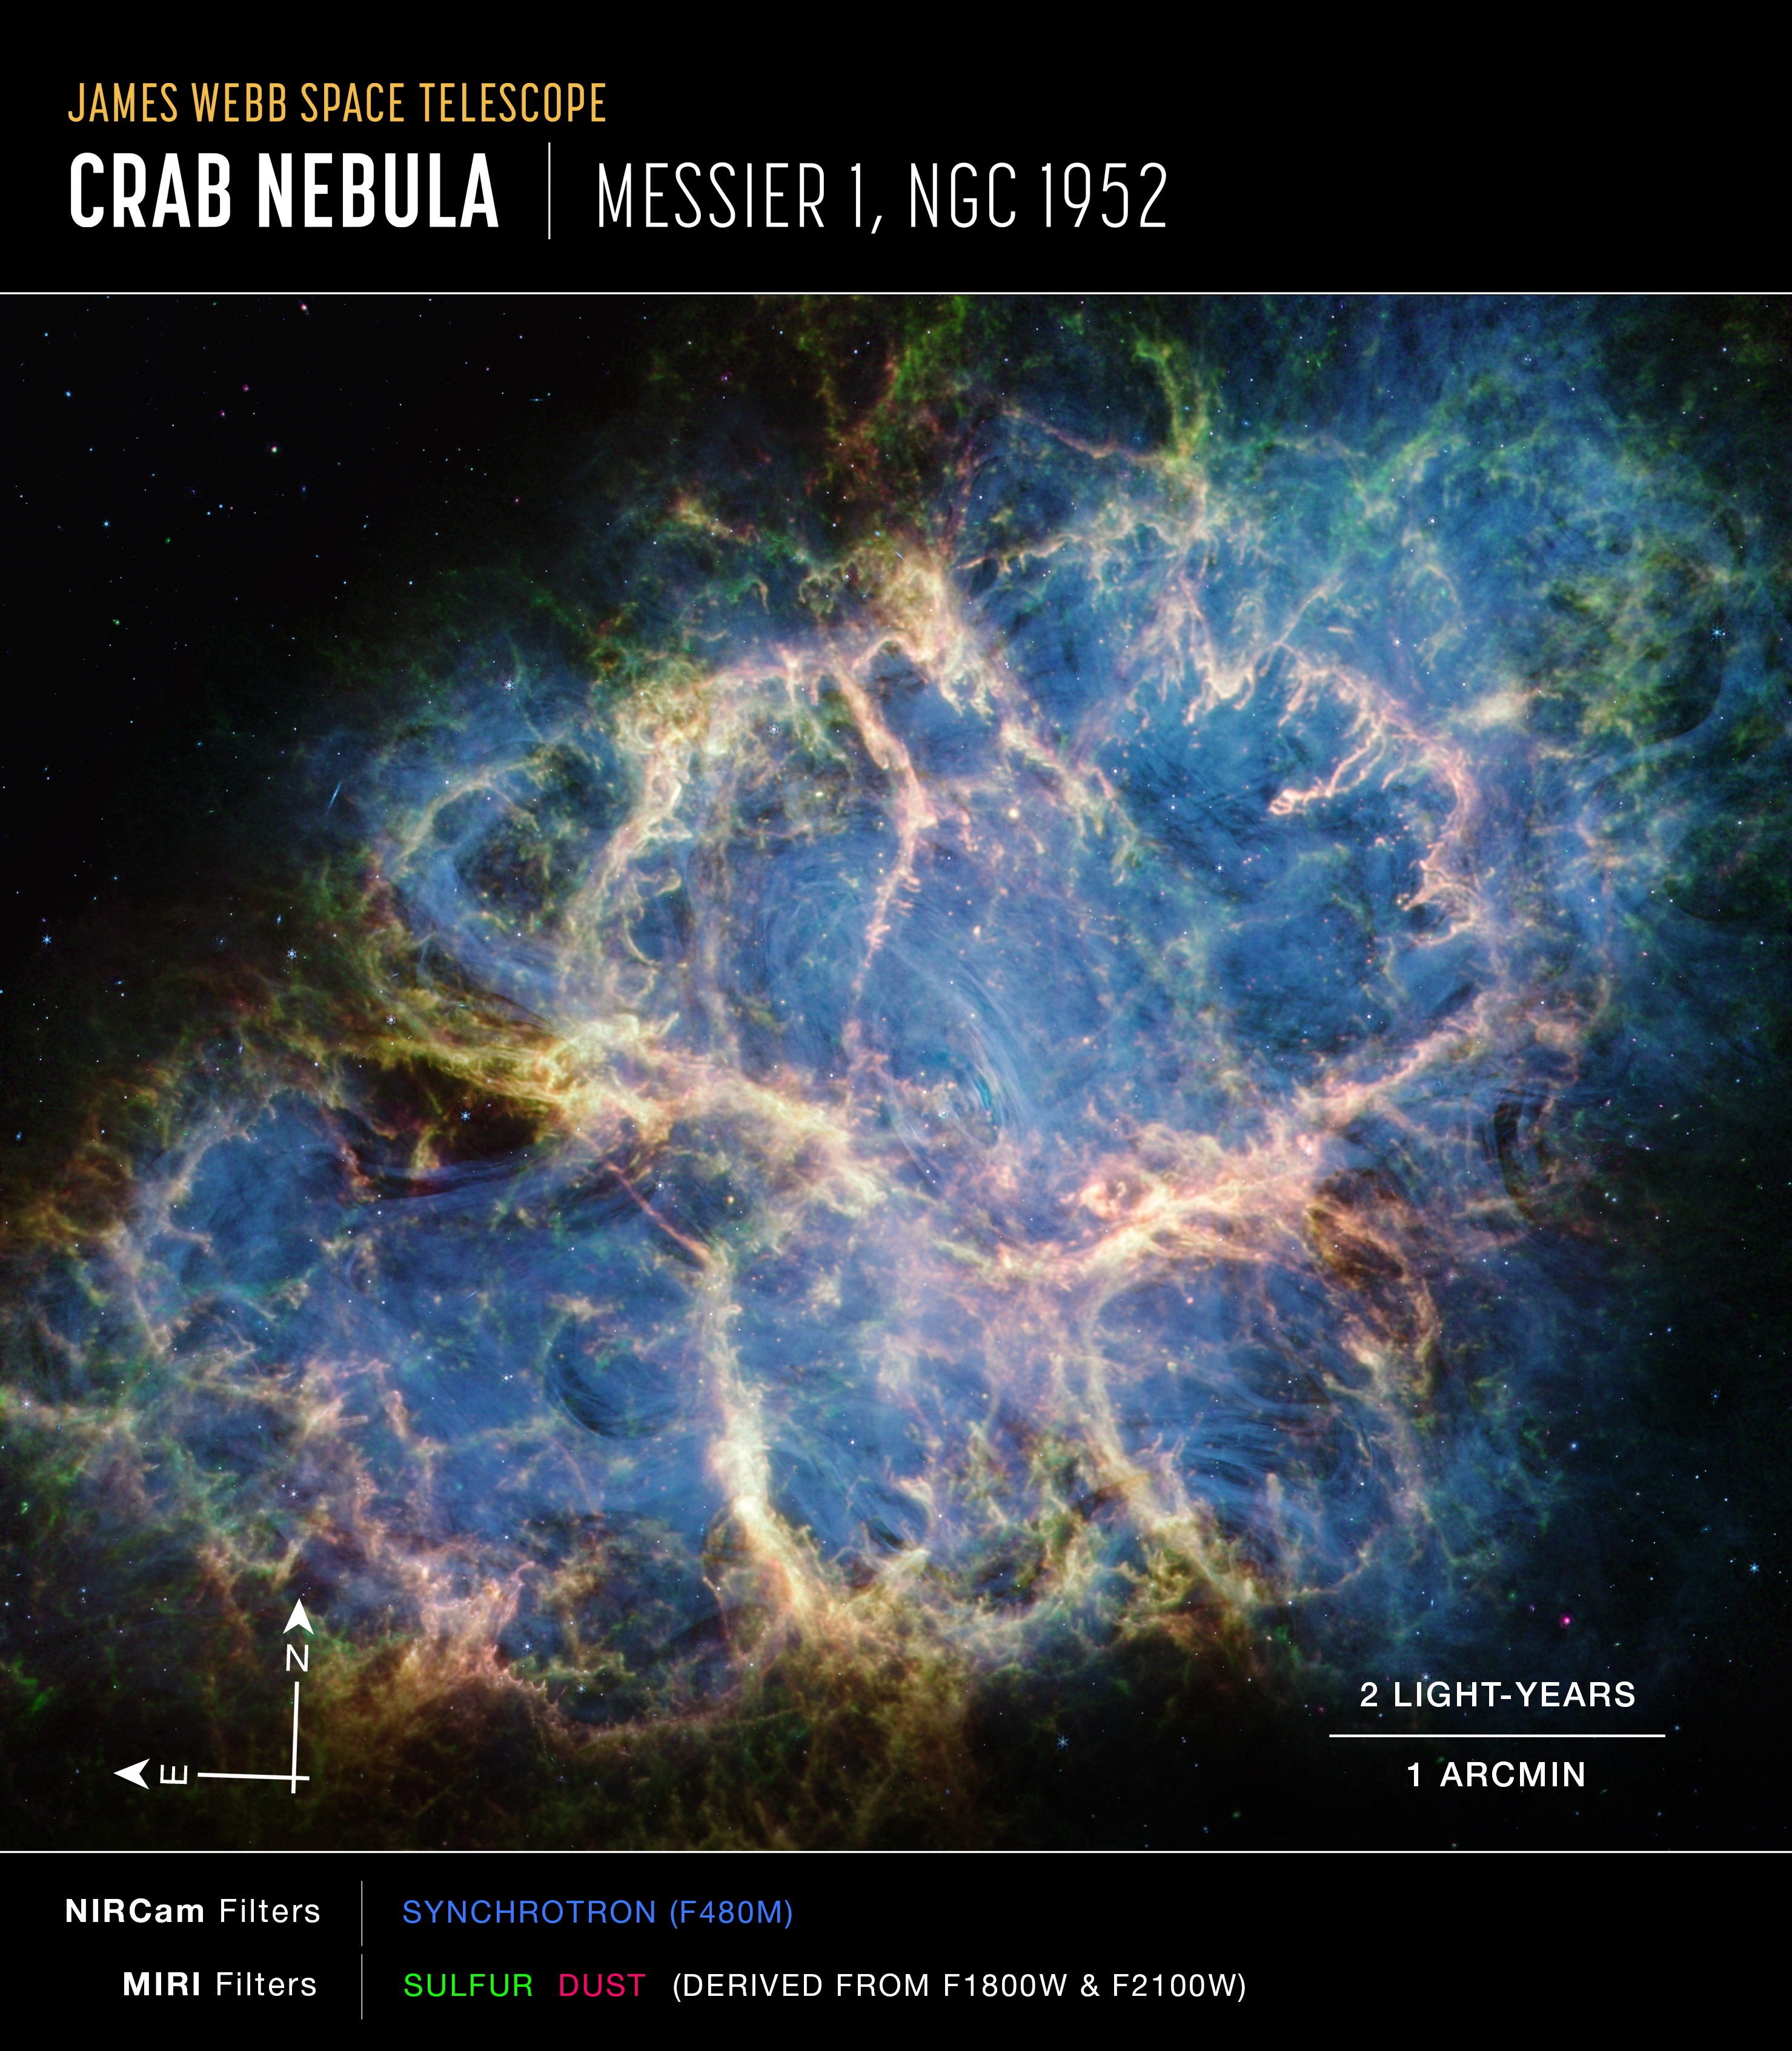

Crab Nebula (MIRI and NIRCam image, annotated)

Image of the Crab Nebula captured by Webb’s NIRCam and MIRI, with compass arrows, scale bar, and colour key for reference.

The north and east compass arrows show the orientation of the image on the sky. Note that the relationship between north and east on the sky (as seen from below) is flipped relative to direction arrows on a map of the ground (as seen from above).

The scale bar is labelled in light-years, which is the distance that light travels in one Earth-year. (It takes two years for light to travel a distance equal to the length of the bar.) One light-year is equal to about 9.46 trillion kilometres or 5.88 trillion miles. The field of view shown in this image is approximately 10 light-years across.

This image shows invisible near-infrared and mid-infrared wavelengths of light that have been translated into visible-light colours. The colour key shows which components were observed by NIRCam and MIRI, and which visible-light colour is assigned to each feature.

Credit: NASA, ESA, CSA, STScI, T. Temim (Princeton University)